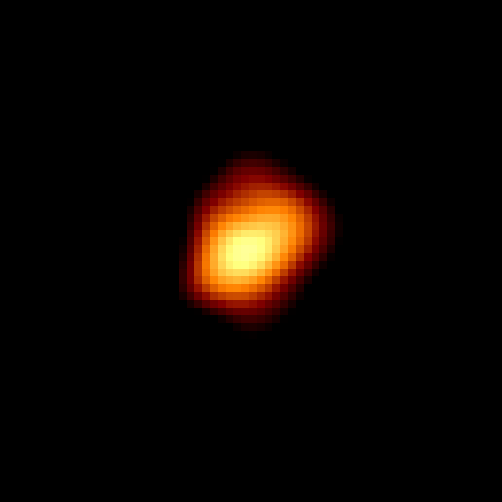

Omicron Ceti

Hubble's visible-light image of the disk of Omicron Ceti reveals it has an odd, asymmetrical shape resembling a football. This may be tied to dramatic changes occurring during its expansion-contraction cycles, or to the presence of unresolved spots on its surface.

Hubble measurements show the red giant star is 700 times larger than our Sun.

Credit: Margarita Karovska (Harvard-Smithsonian Center for Astrophysics), and NASA/ESA